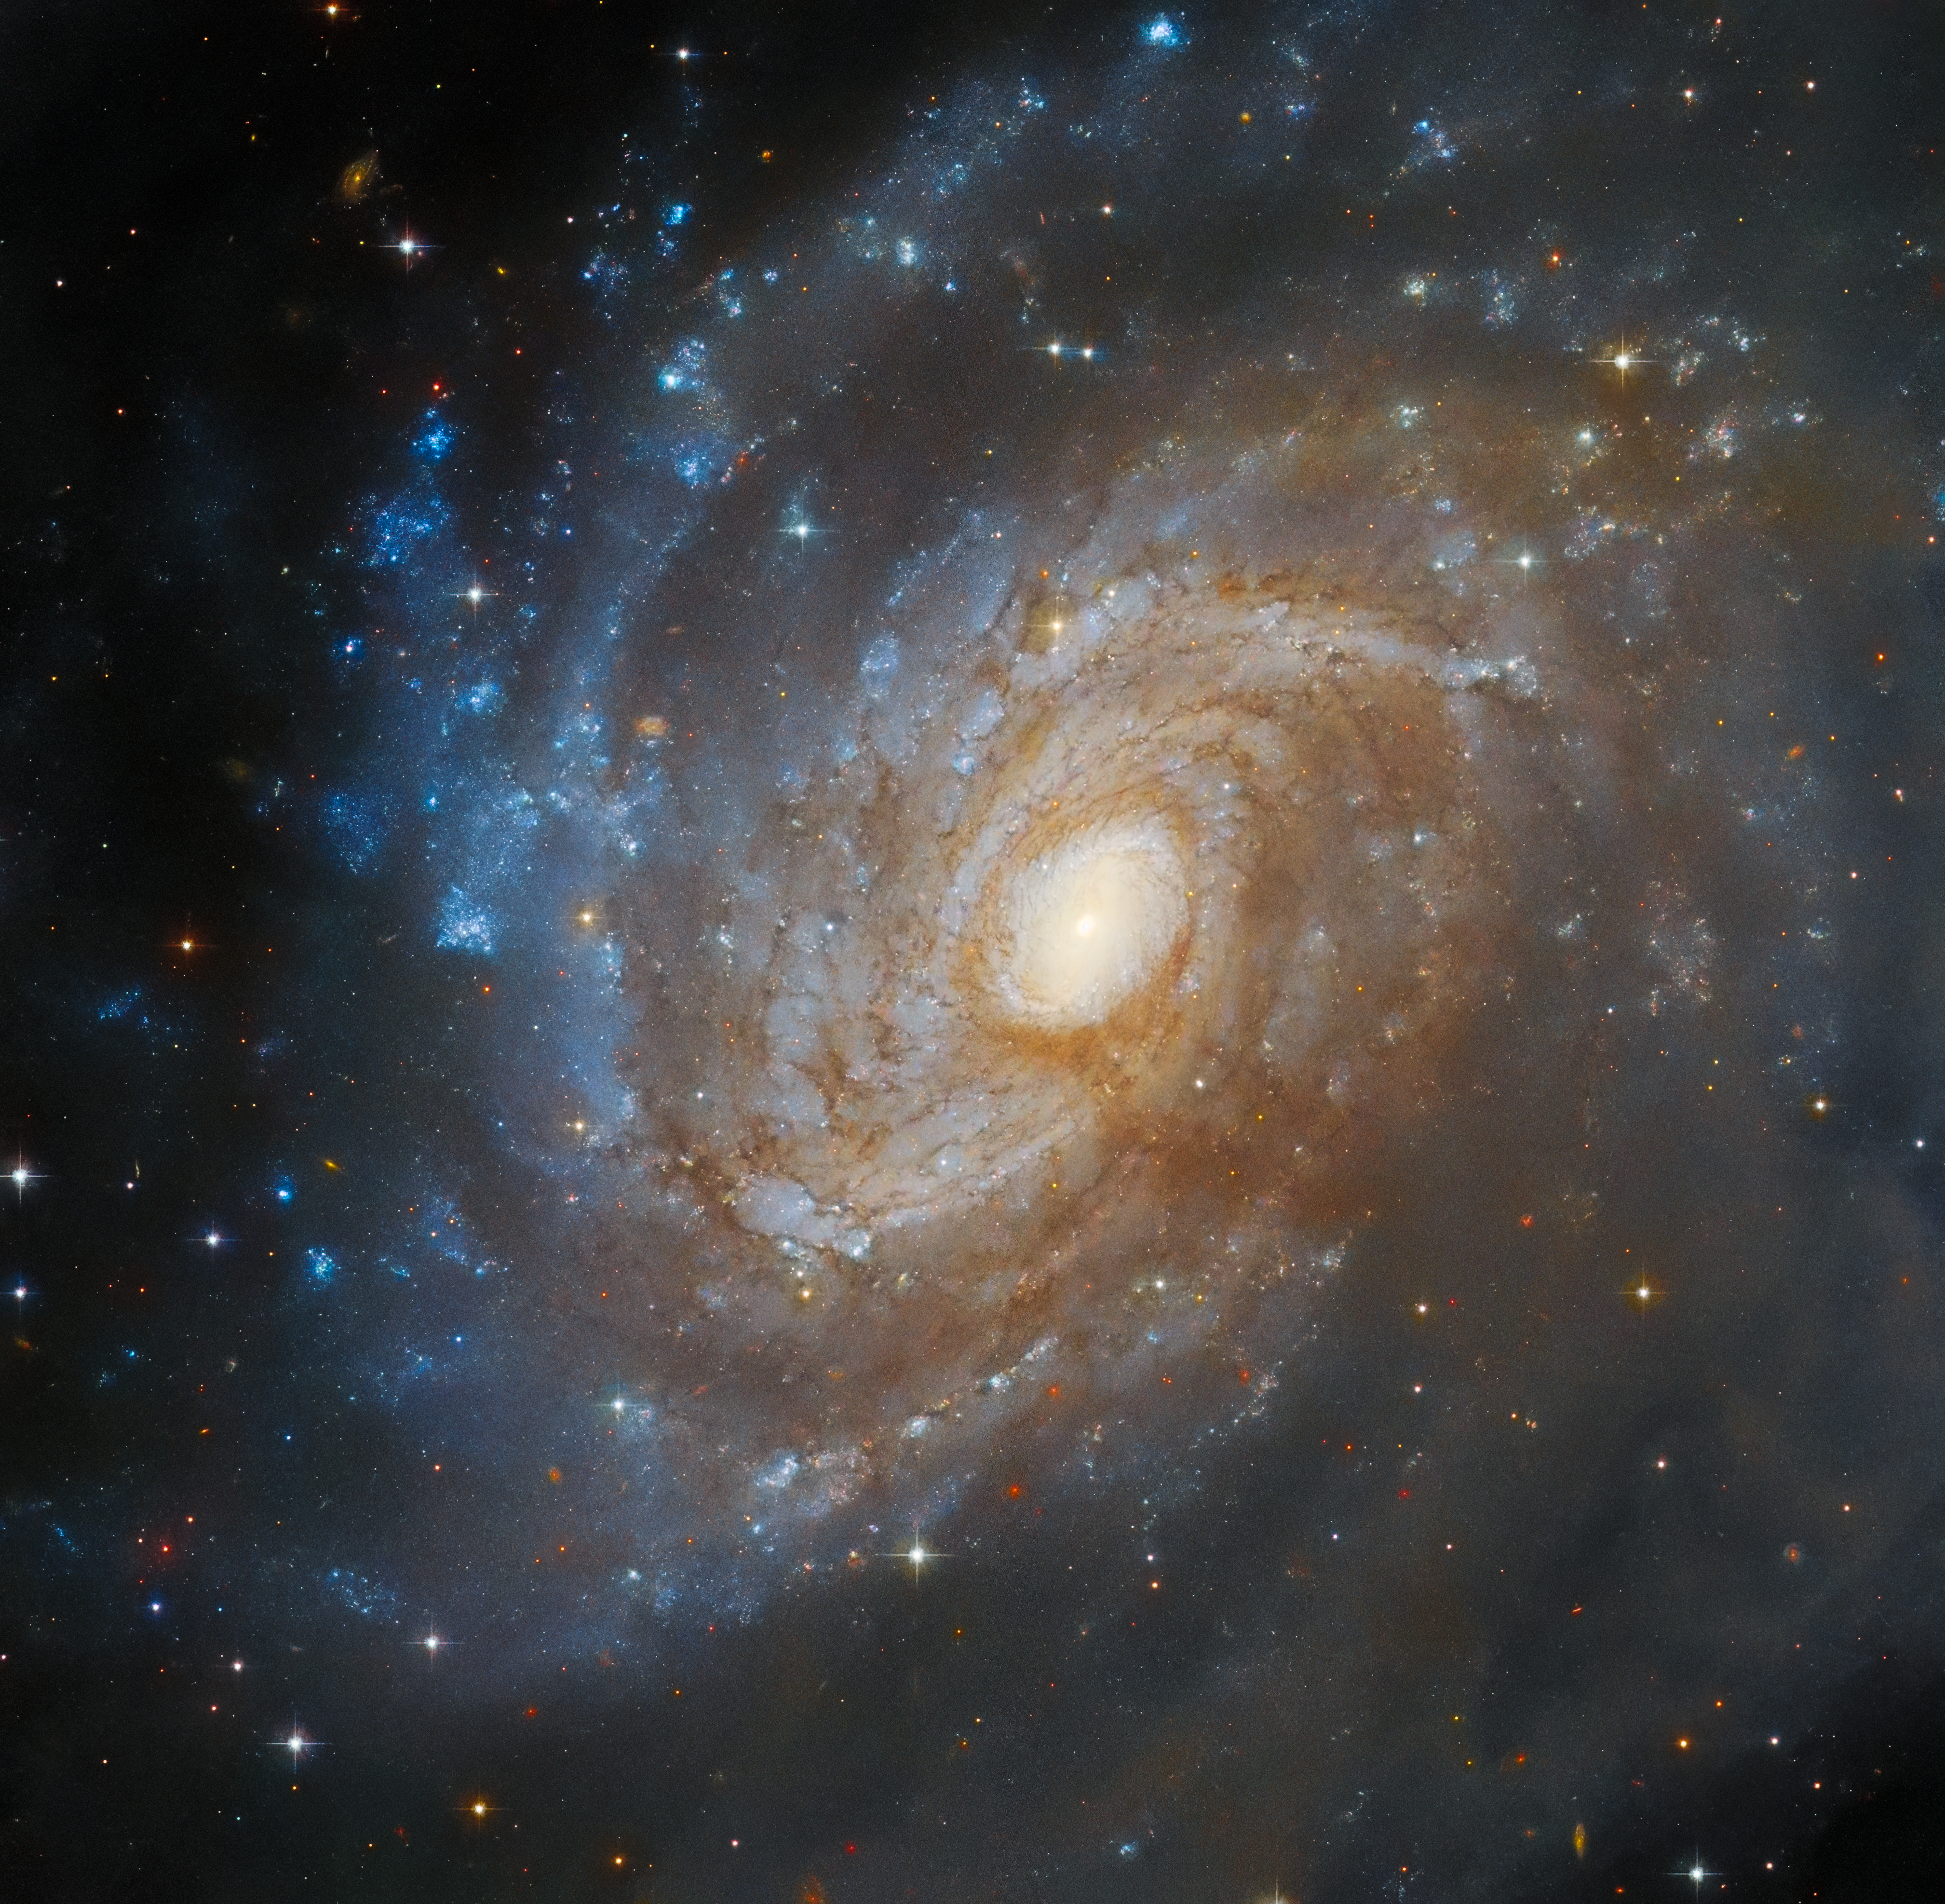

Hidden in a dark cloud

The subject of this week’s Picture of the Week from Hubble is the spiral galaxy IC 4633, located 100 million light-years away from us in the constellation Apus. IC 4633 is a galaxy rich in star-forming activity, as well as hosting an active galactic nucleus at its core. From our point of view, the galaxy is tilted mostly towards us, giving astronomers a fairly good view of its billions of stars.

However, we can’t fully appreciate the features of this galaxy — at least in visible light — because it’s partially concealed by a stretch of dark dust. This dark nebula is part of the Chamaeleon star-forming region, itself located only around 500 light-years from us, in a nearby part of the Milky Way galaxy. The dark clouds in the Chamaeleon region occupy a large area of the southern sky, covering their namesake constellation but also encroaching on nearby constellations, like Apus. The cloud is well-studied for its treasury of young stars, particularly the cloud Cha I, which has been imaged by Hubble and also by the NASA/ESA/CSA James Webb Space Telescope.

The cloud overlapping IC 4633 lies east of the well-known Cha I, II and III, and has been called MW9 or the South Celestial Serpent. A vast, narrow trail of faint gas that snakes over the southern celestial pole, it’s much more subdued-looking than its neighbours. It’s classified as an integrated flux nebula (IFN) — a cloud of gas and dust in the Milky Way galaxy that’s not near to any single star, and is only faintly lit by the total light of all the galaxy’s stars. Hubble has no problem making out the South Celestial Serpent, though this image captures only a tiny part of it. For a showy astronomical object like IC 4633, among the South Celestial Serpent’s coils clearly isn’t a bad place to hide.

Credit: ESA/Hubble & NASA, J. Dalcanton, Dark Energy Survey/DOE/FNAL/DECam/CTIO/NOIRLab/NSF/AURA Acknowledgement: L. Shatz